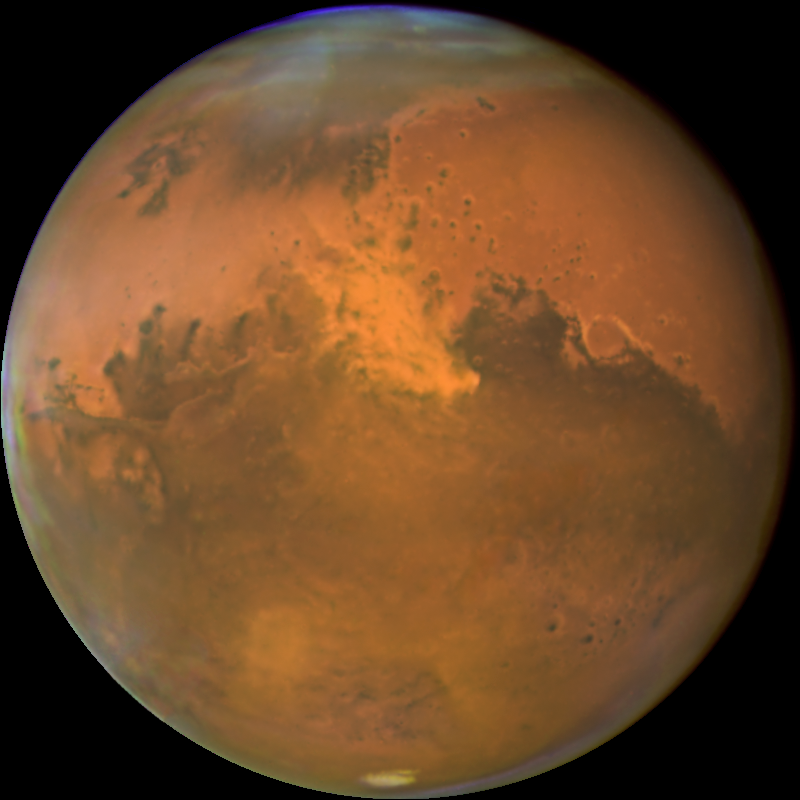

Mars Kicks Up the Dust as it Makes Closest Approach to Earth

The NASA/ESA Hubble Space Telescope snapped this picture of Mars on October 28, within a day of its closest approach to Earth on the night of October 29. Hubble astronomers were also excited to have captured a regional dust storm on Mars that has been growing and evolving over the past few weeks.

Credit: NASA, ESA, The Hubble Heritage Team (STScI/AURA), J. Bell (Cornell University) and M. Wolff (Space Science Institute)